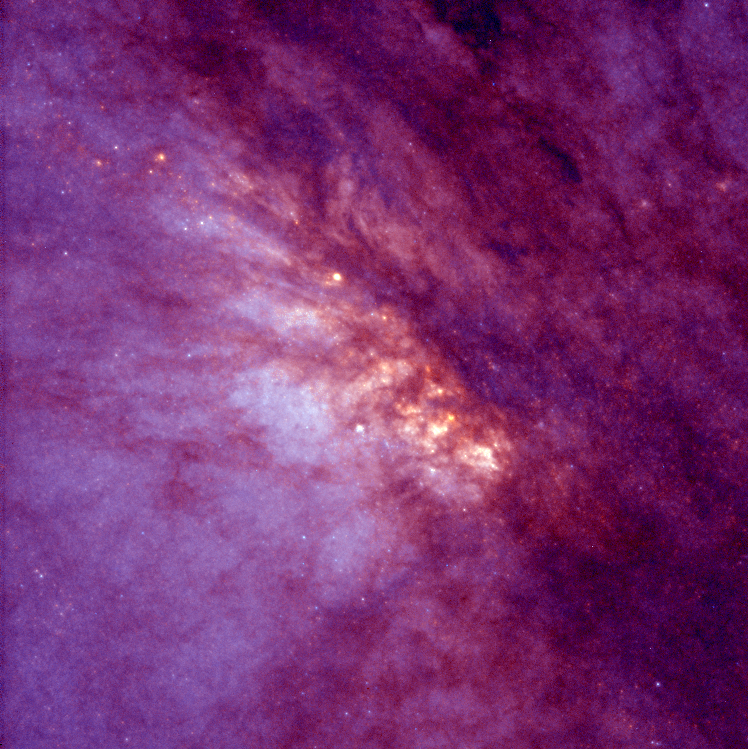

NGC 253

This NASA/ESA Hubble Space Telescope image of the core of the nearest starburst spiral galaxy, NGC 253, reveals violent star formation within a region 1, 000 light-years across. A starburst galaxy has an exceptionally high rate of star birth, first identified by its excess of infrared radiation from warm dust.

Credit: Carnegie Institution of Washington